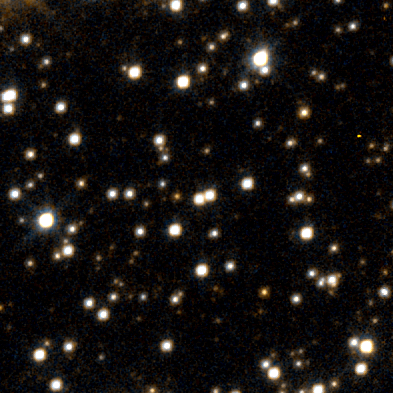

Lone Black Hole Passes in Front of Star (Hubble View)

The Hubble Space Telescope clearly resolves a lensed star and yields its brightness.

Credit: NASA/ESA and Dave Bennett (University of Notre Dame, Indiana)